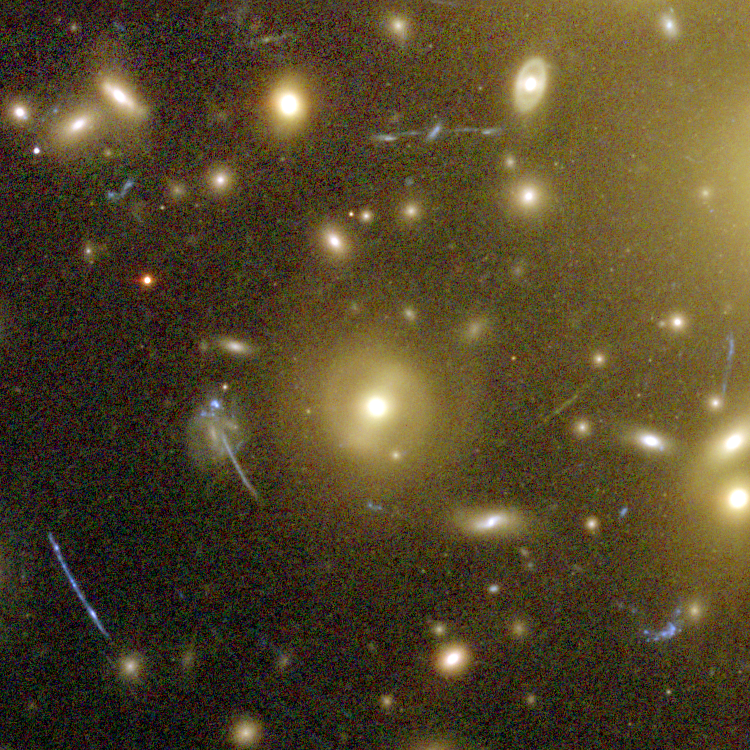

Galaxy Cluster Abell 1689 Details

The Advanced Camera for Surveys (ACS) aboard NASA's Hubble Space Telescope has here used a natural "zoom lens" in space to peer straight through the center of one of the most massive galaxy clusters known, called Abell 1689. Some of the faintest objects in this picture are probably more than 13 billion light-years away.

Credit: NASA, N. Benitez (JHU), T. Broadhurst (The Hebrew University), H. Ford (JHU), M. Clampin(STScI), G. Hartig (STScI), G. Illingworth (UCO/Lick Observatory), the ACS Science Team and ESA